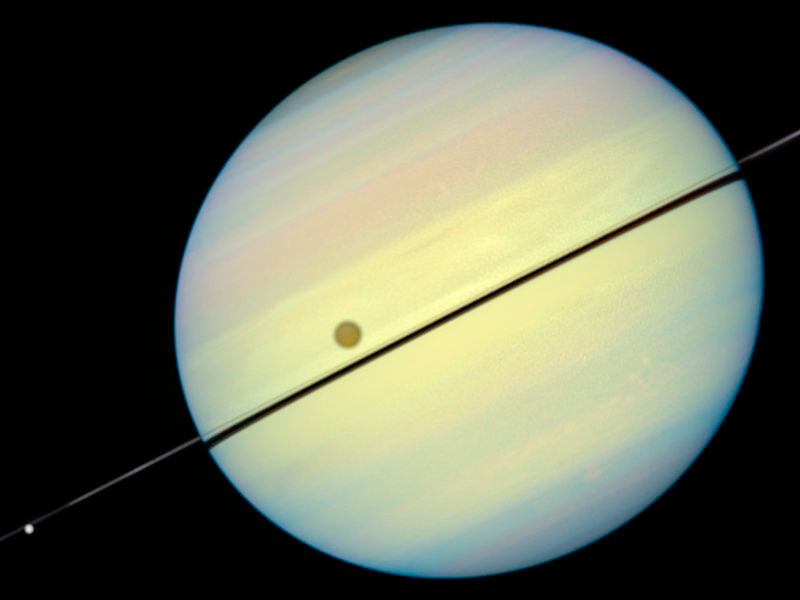

Hubble Catches Titan Chasing Its Shadow - Frame 5

This movie still shows Titan chasing its shadow across Saturn's disk. The still is from a movie created from images taken by NASA/ESA Hubble Space Telescope. It reveals the planet's rings tilted nearly edge-on toward the Earth, an event that occurs once every 15 years.

Credit: NASA/ESA and E. Karkoschka (University of Arizona)